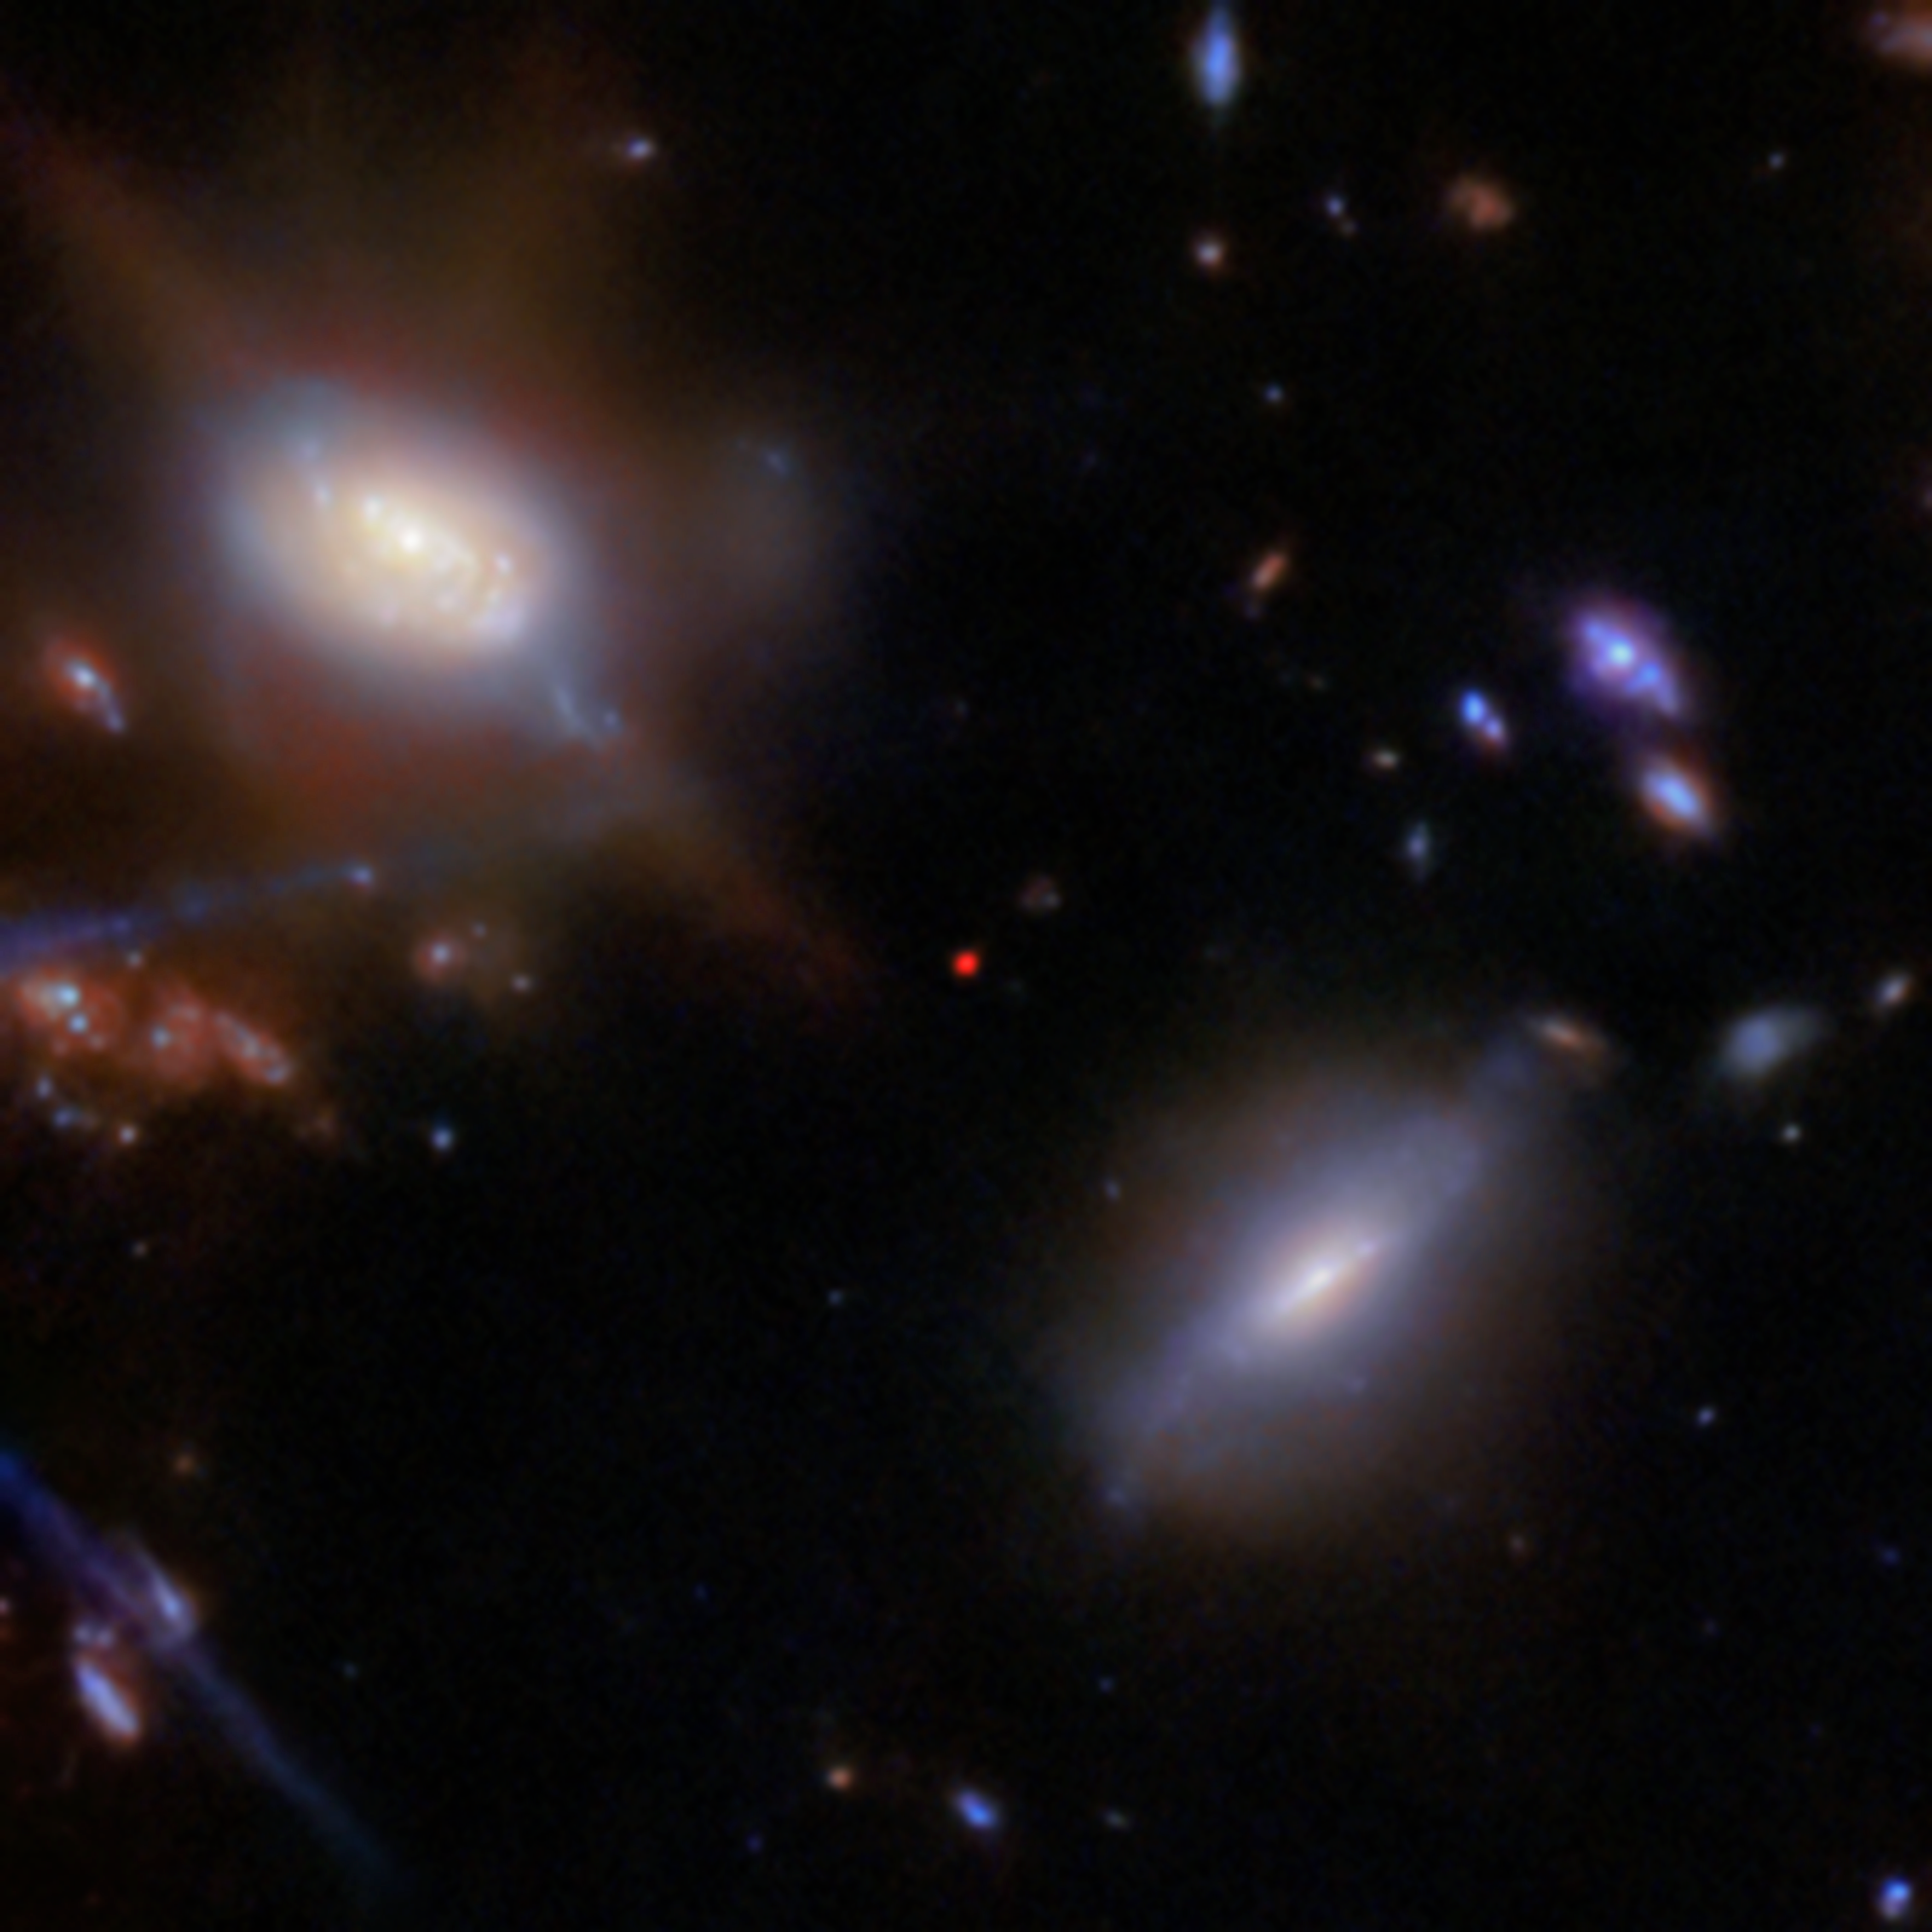

JADES-GS-z13-1 (NIRCam close-up)

The incredibly distant galaxy GS-z13-1, observed just 330 million years after the Big Bang, was initially discovered with deep imaging from the NASA/ESA/CSA James Webb Space Telescope. Now, an international team of astronomers has definitively identified powerful hydrogen emission from this galaxy at an unexpectedly early period in the Universe’s history, a probable sign that we are seeing some of the first hot stars from the dawn of the Universe.

This image shows the galaxy GS-z13-1 (the red dot at centre), imaged with Webb’s Near-Infrared Camera (NIRCam) as part of the JWST Advanced Deep Extragalactic Survey (JADES) programme. These data from NIRCam allowed researchers to identify GS-z13-1 as an incredibly distant galaxy, and to put an estimate on its redshift value. Webb’s unique infrared sensitivity is necessary to observe galaxies at this extreme distance, whose light has been redshifted into infrared wavelengths during its long journey across the cosmos.

To confirm the galaxy’s redshift, the team turned to Webb’s Near-Infrared Spectrograph (NIRSpec) instrument. With new observations permitting advanced spectroscopy of the galaxy’s emitted light, the team not only confirmed GS-z13-1’s redshift of 13.0, they also revealed the strong presence of a type of ultraviolet radiation called Lyman-α emission. This is a telltale sign of the presence of newly forming stars, or a possible active galactic nucleus in the galaxy, but at a much earlier time than astronomers had thought possible. The result holds great implications for our understanding of the Universe.

Credit: ESA/Webb, NASA, STScI, CSA, JADES Collaboration, Brant Robertson (UC Santa Cruz), Ben Johnson (CfA), Sandro Tacchella (Cambridge), Phill Cargile (CfA), J. Witstok, P. Jakobsen, A. Pagan (STScI), M. Zamani (ESA/Webb)